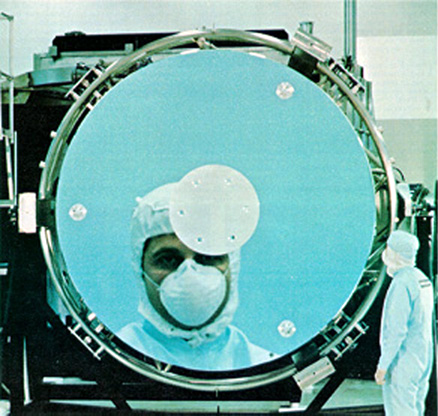

The Hubble Space Telescope Mirror

In this image we see the Hubble Space Telescope Mirror. Notice the man at the right.

Credit: NASA/ESA